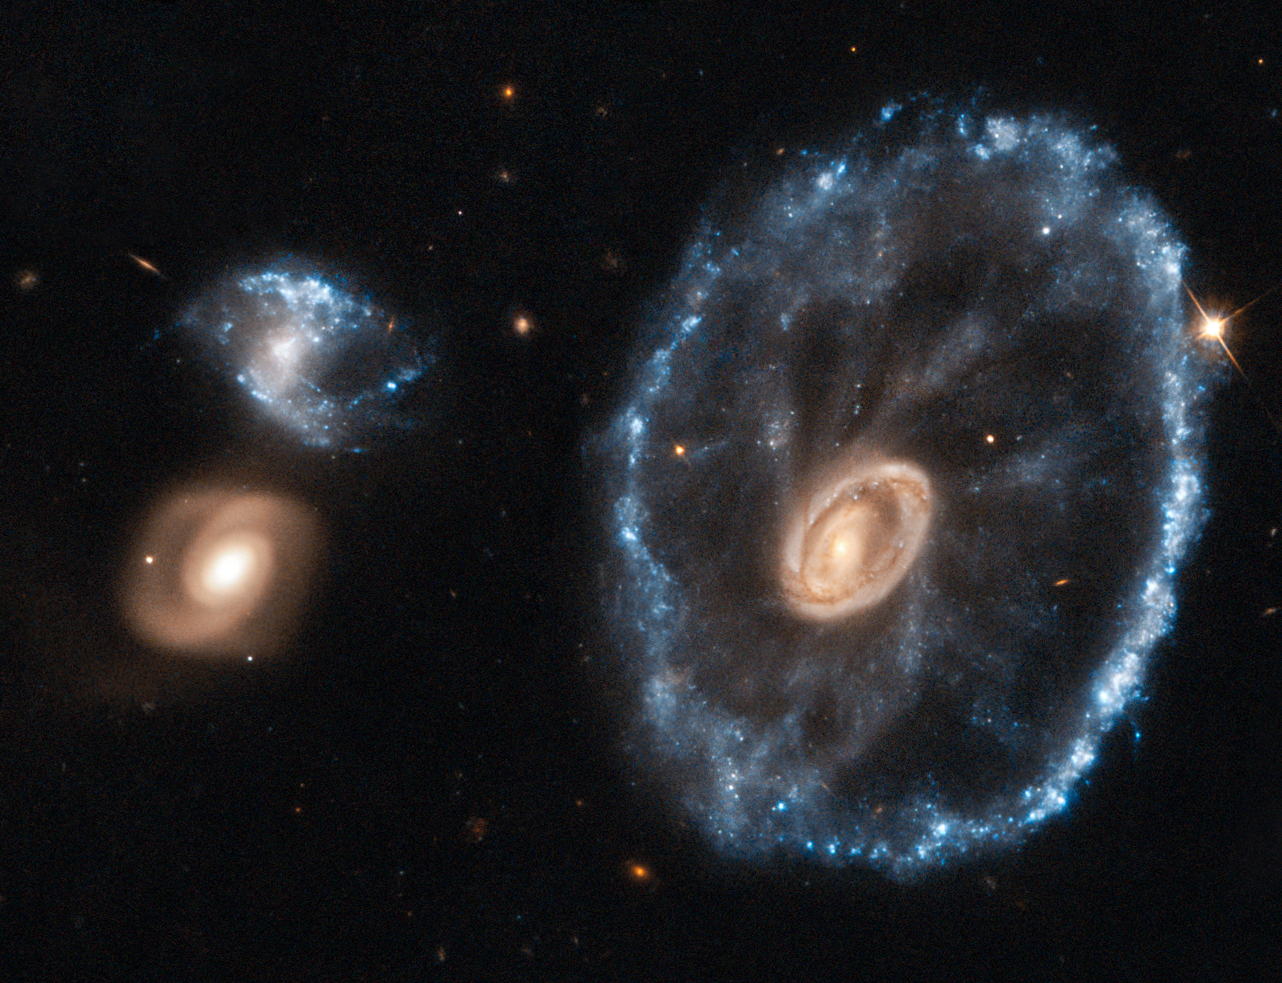

Doing cartwheels to celebrate the end of an era

An image of the Cartwheel Galaxy taken with the NASA/ESA Hubble Space Telescope has been reprocessed using the latest techniques to mark the closure of the Space Telescope European Coordination Facility (ST-ECF), based near Munich in Germany, and to celebrate its achievements in supporting Hubble science in Europe over the past 26 years.

Astronomer Bob Fosbury, who is stepping down as Head of the ST-ECF, was responsible for much of the early research into the Cartwheel Galaxy along with the late Tim Hawarden — including giving the object its very apposite name — and so this image was selected as a fitting tribute. The object was first spotted on wide-field images from the UK Schmidt telescope and then studied in detail using the Anglo-Australian Telescope.

Lying about 500 million light-years away in the constellation of Sculptor, the cartwheel shape of this galaxy is the result of a violent galactic collision. A smaller galaxy has passed right through a large disc galaxy and produced shock waves that swept up gas and dust — much like the ripples produced when a stone is dropped into a lake — and sparked regions of intense star formation (appearing blue). The outermost ring of the galaxy, which is 1.5 times the size of our Milky Way, marks the shock wave’s leading edge. This object is one of the most dramatic examples of the small class of ring galaxies.

This image was produced after Hubble data was reprocessed using the free open source software FITS Liberator 3, which was developed at the ST-ECF. Careful use of this widely used state-of-the-art tool on the original Hubble observations of the Cartwheel Galaxy has brought out more detail in the image than ever before.

Although the ST-ECF is closing, ESA’s mission to bring amazing Hubble discoveries to the public will be unaffected, with Hubblecasts, press and photo releases, and Hubble Pictures of the Week continuing to be regularly posted on spacetelescope.org.

Credit: ESA/Hubble & NASA